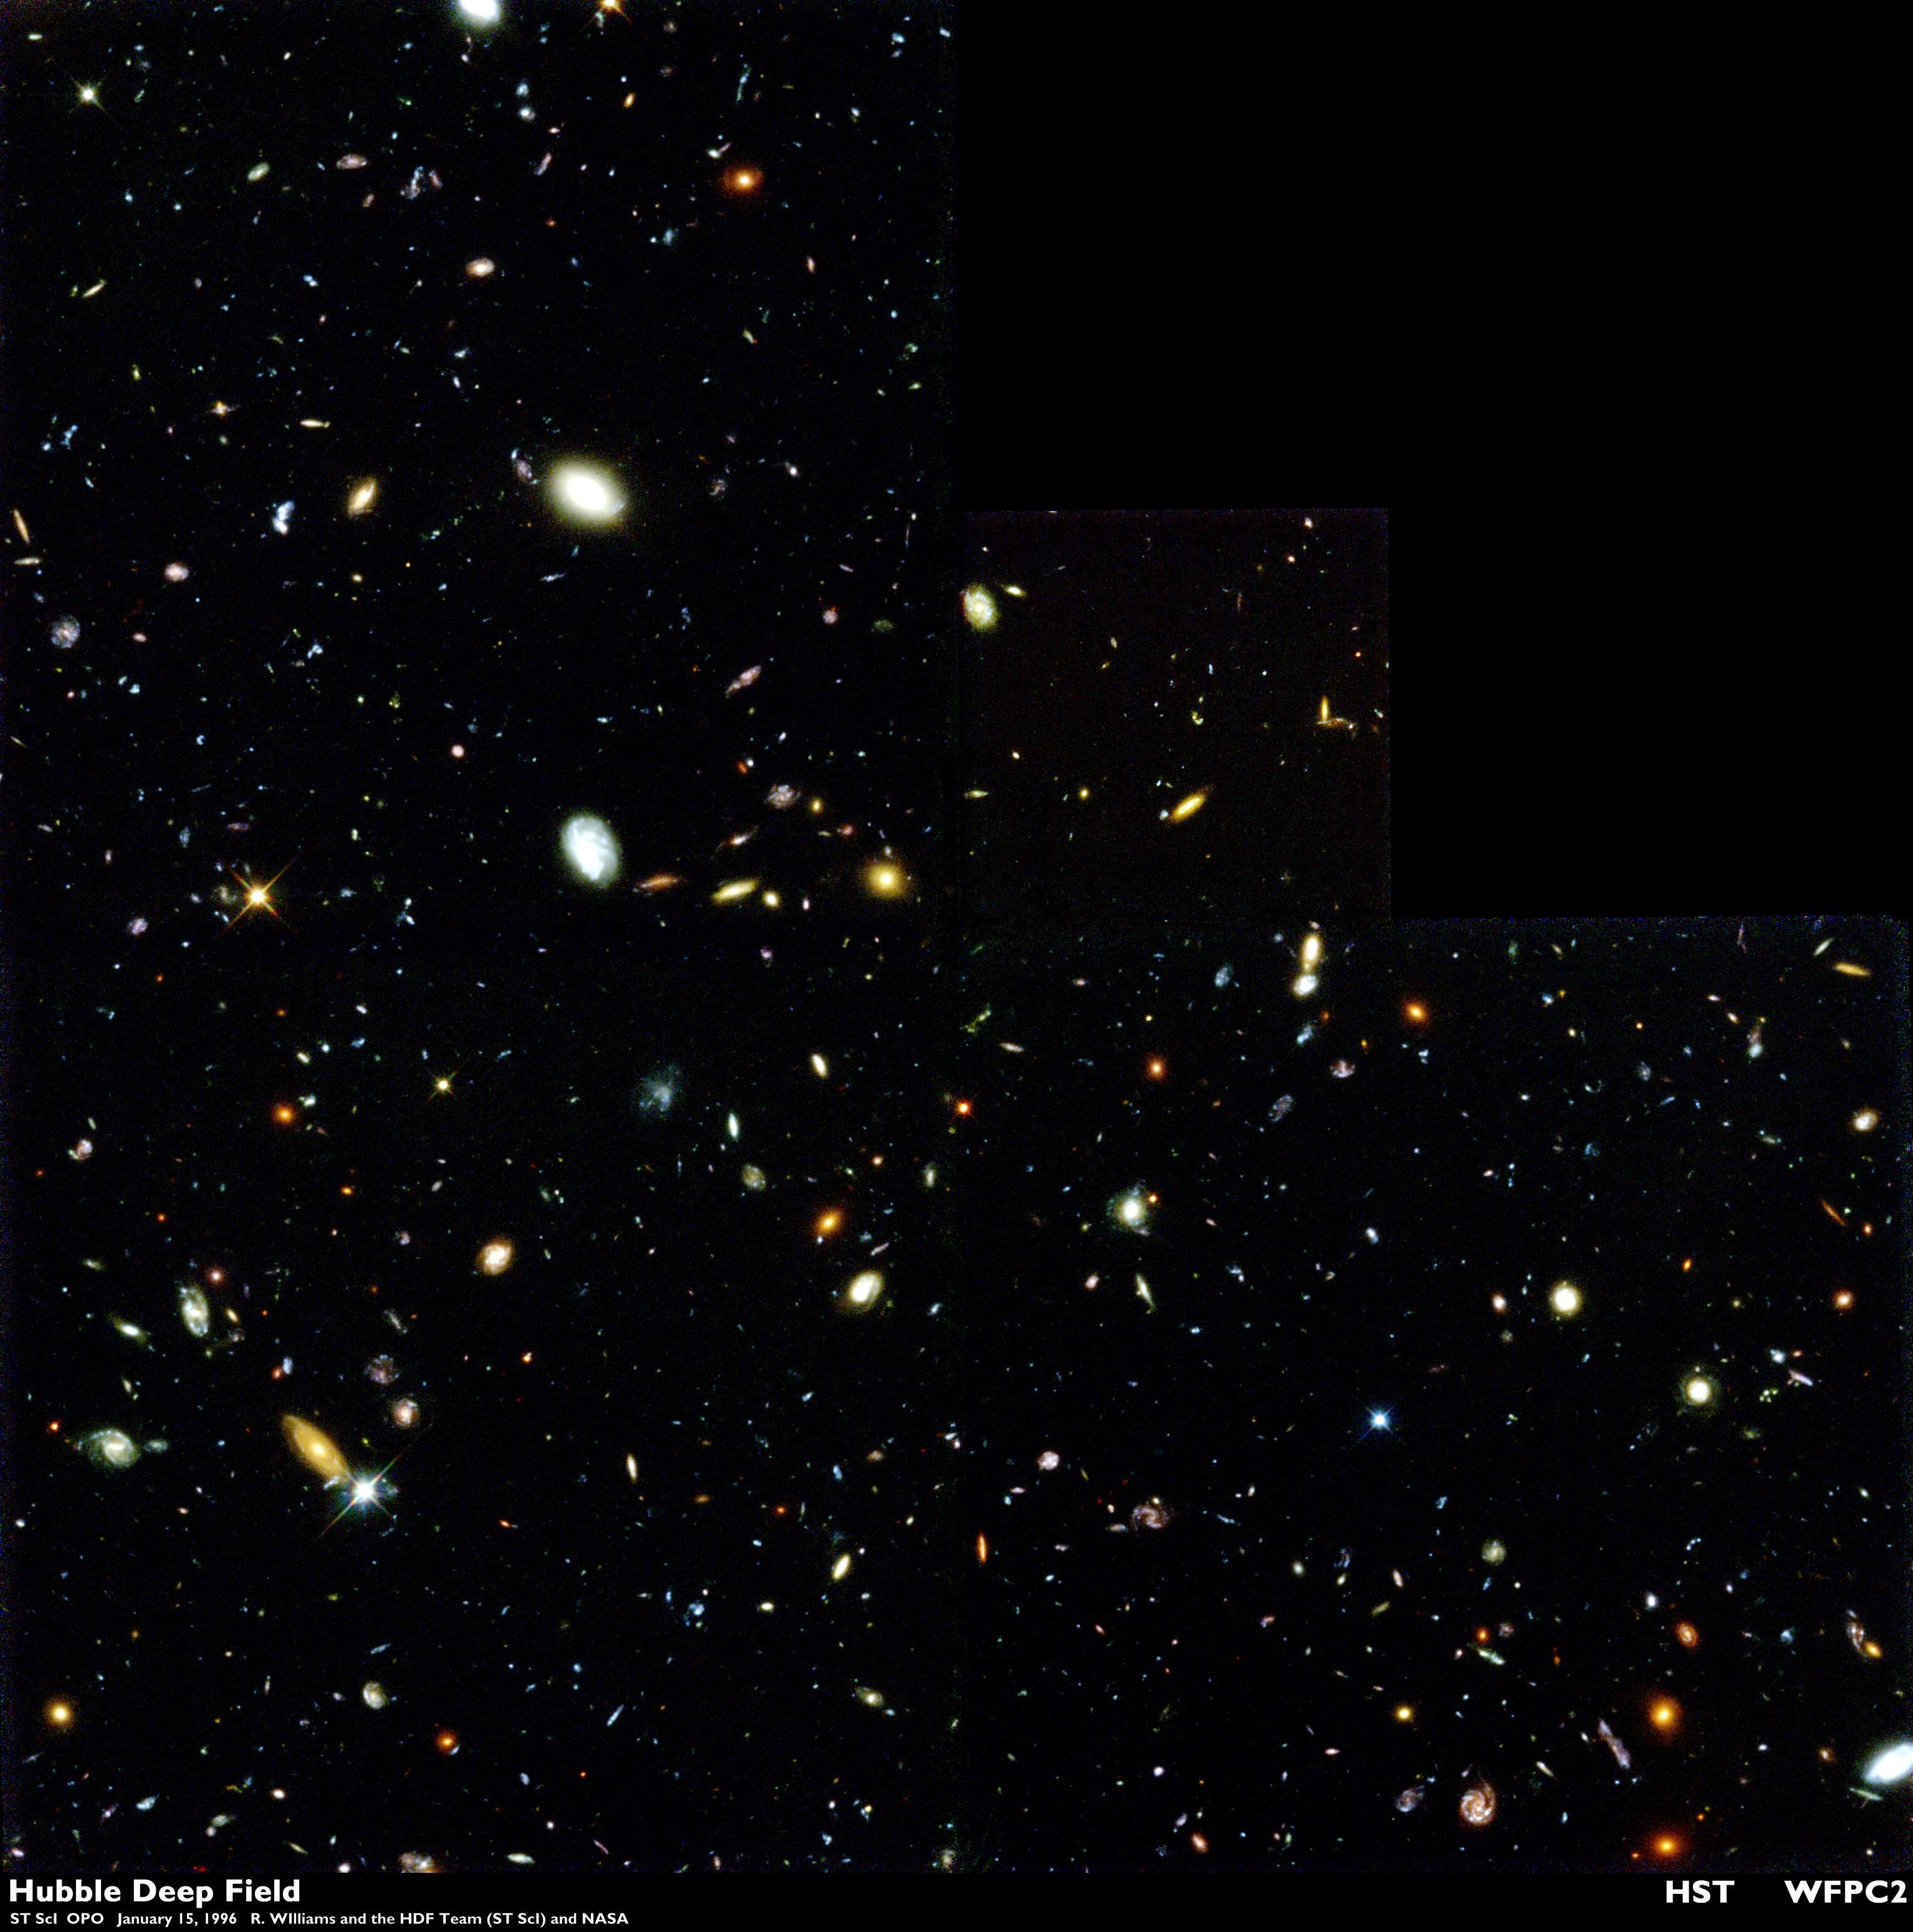

The Hubble Deep Field

Several hundred never before seen galaxies are visible in this 'deepest-ever' view of the universe, called the Hubble Deep Field (HDF), made with the Hubble Space Telescope.

Besides the classical spiral and elliptical shaped galaxies, there is a bewildering variety of other galaxy shapes and colours that are important clues to understanding the evolution of the universe. Some of the galaxies may have formed less that one billion years after the Big Bang.

Credit: Robert Williams and the Hubble Deep Field Team (STScI) and NASA/ESA